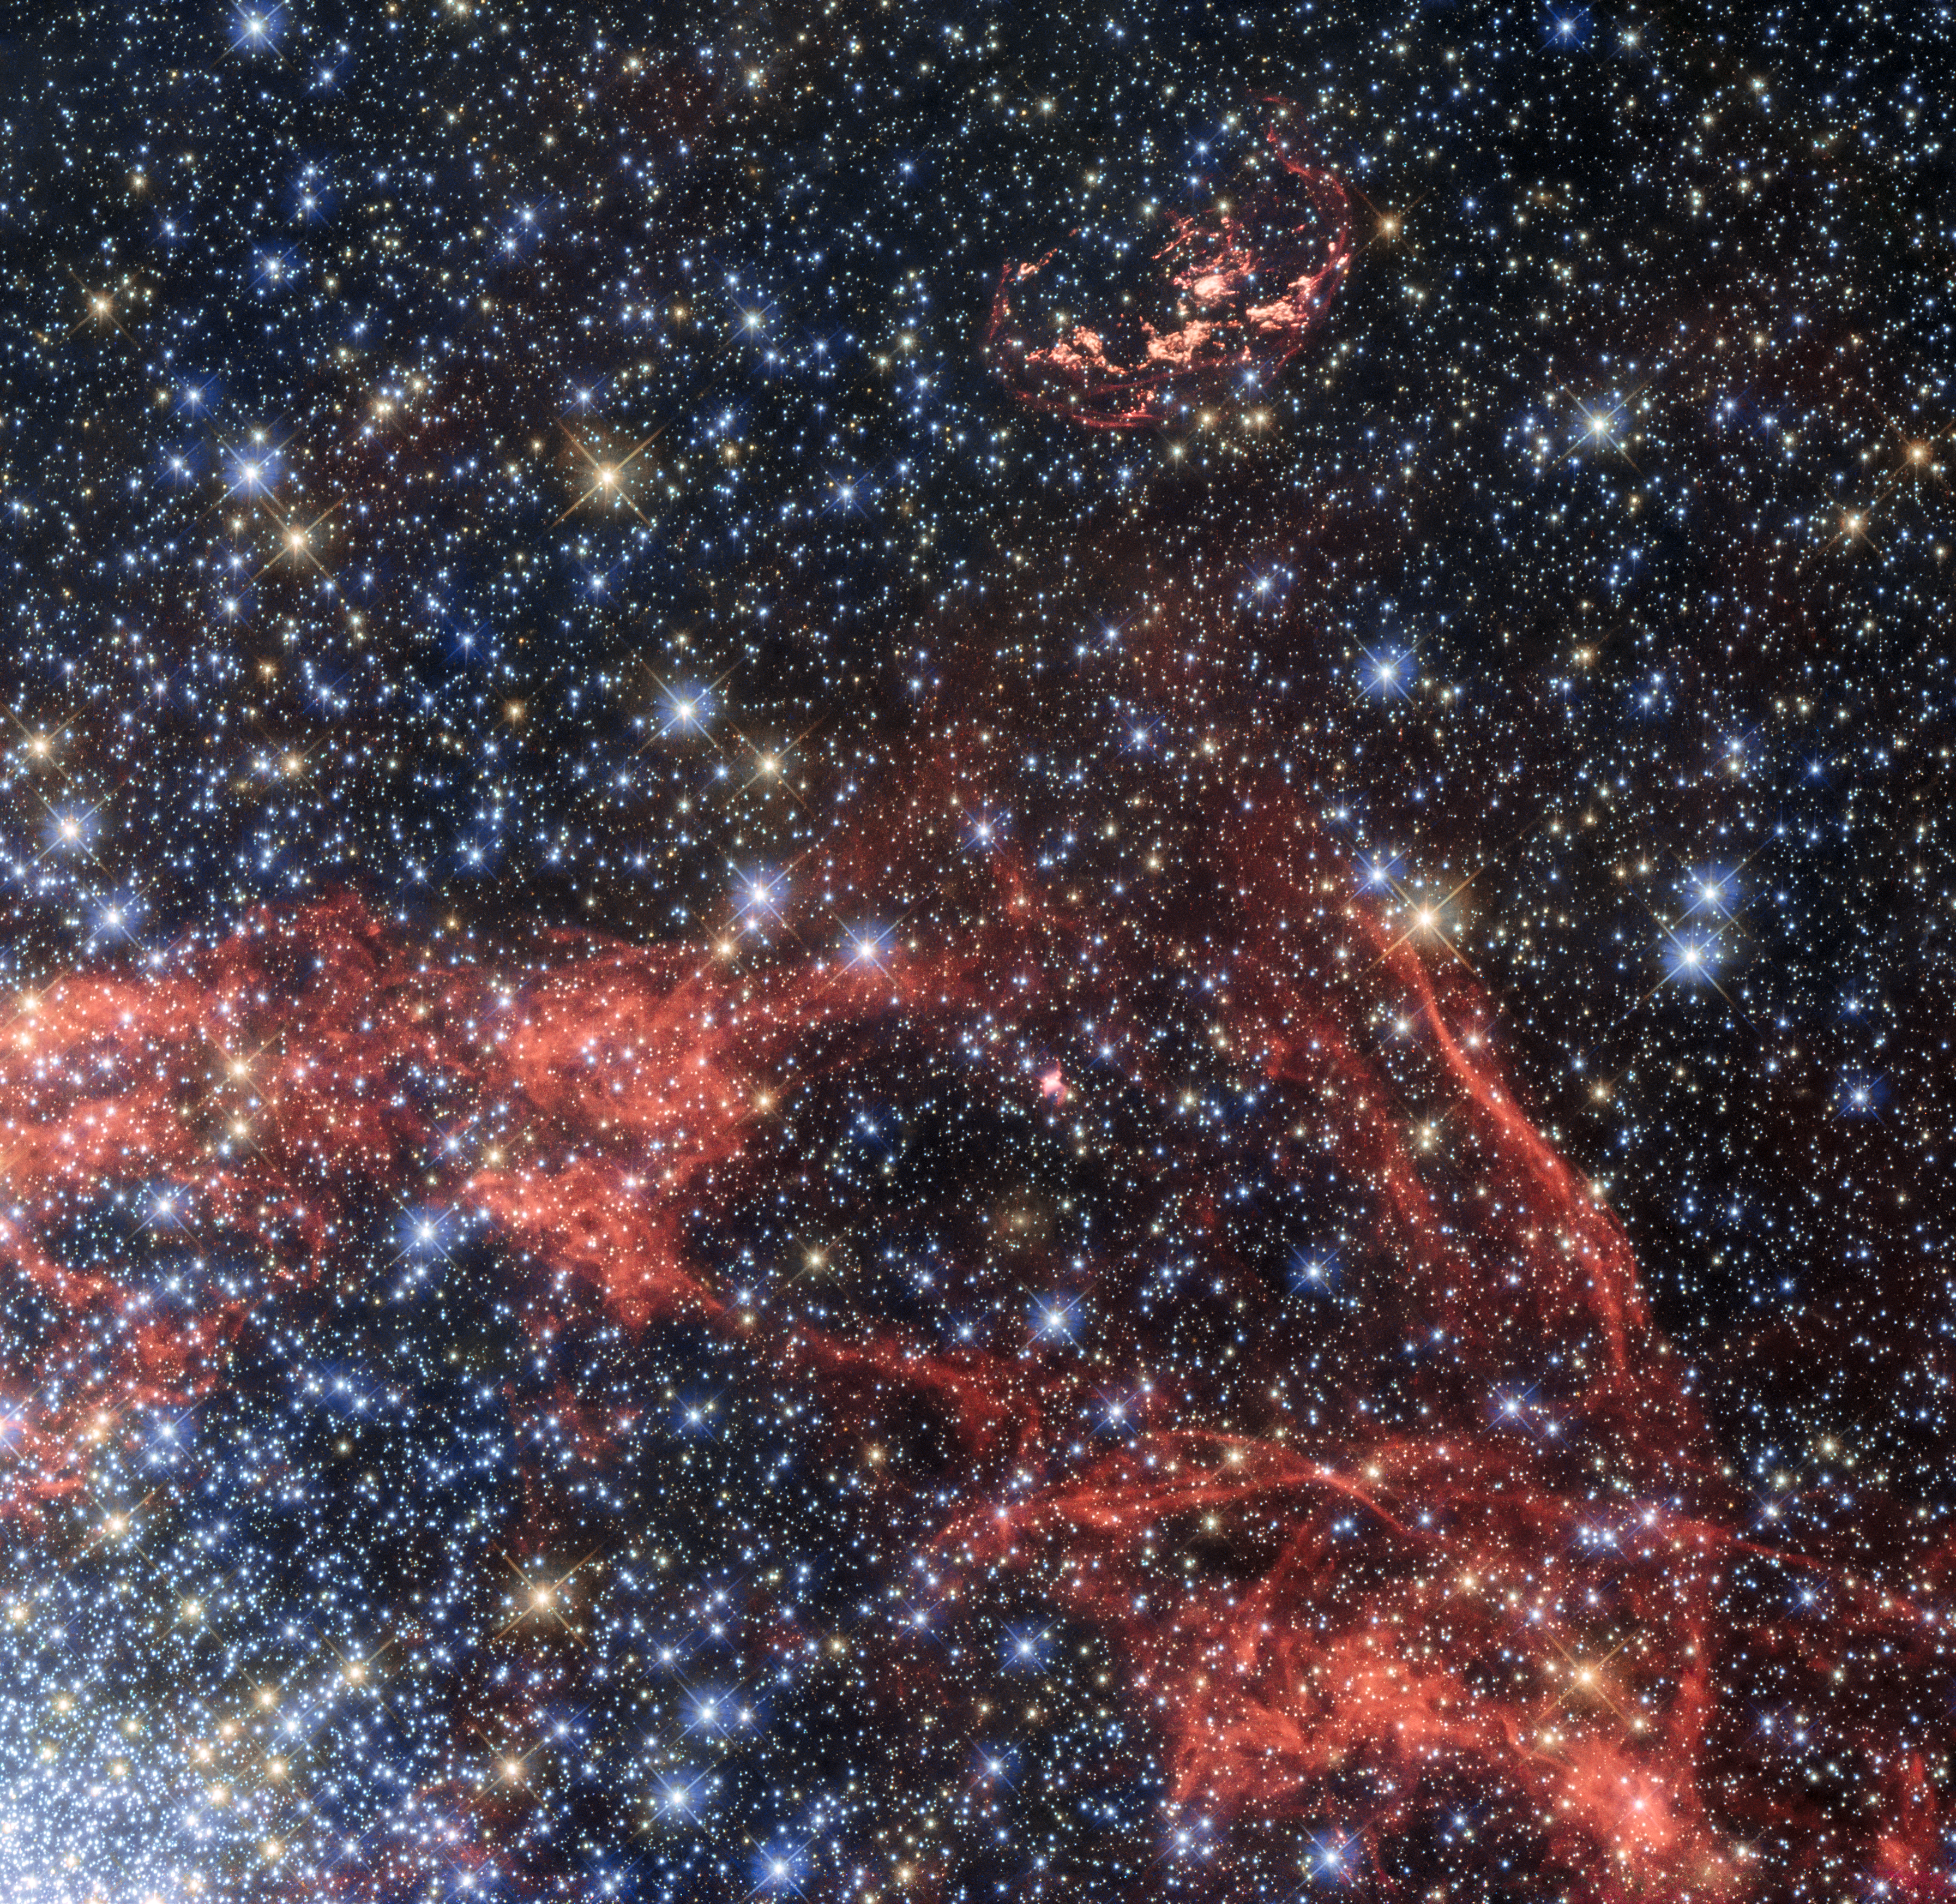

Supernova remnant N103B

This image, taken with the NASA/ESA Hubble Space Telescope, shows the supernova remnant SNR 0509-68.7, also known as N103B (top of the image). N103B was a Type Ia supernova, located in the Large Magellanic Cloud — a neighbouring galaxy of the Milky Way. Owing to its relative proximity to Earth, astronomers observe the remnant to search for a potential stellar survivor of the explosion.

The orange-red filaments visible in the image show the shock fronts of the supernova explosion. These filaments allow astronomers to calculate the original centre of the explosion. The filaments also show that the explosion is no longer expanding as a sphere, but is elliptical in shape. Astronomers assume that part of material ejected by the explosion hit a denser cloud of interstellar material, which slowed its speed. The shell of expanding material being open to one side supports this idea.

The gas in the lower half of the image and the dense concentration of stars in the lower left are the outskirts of the star cluster NGC 1850, which has been observed by Hubble in the past [heic0108].

Credit: ESA/Hubble, NASA